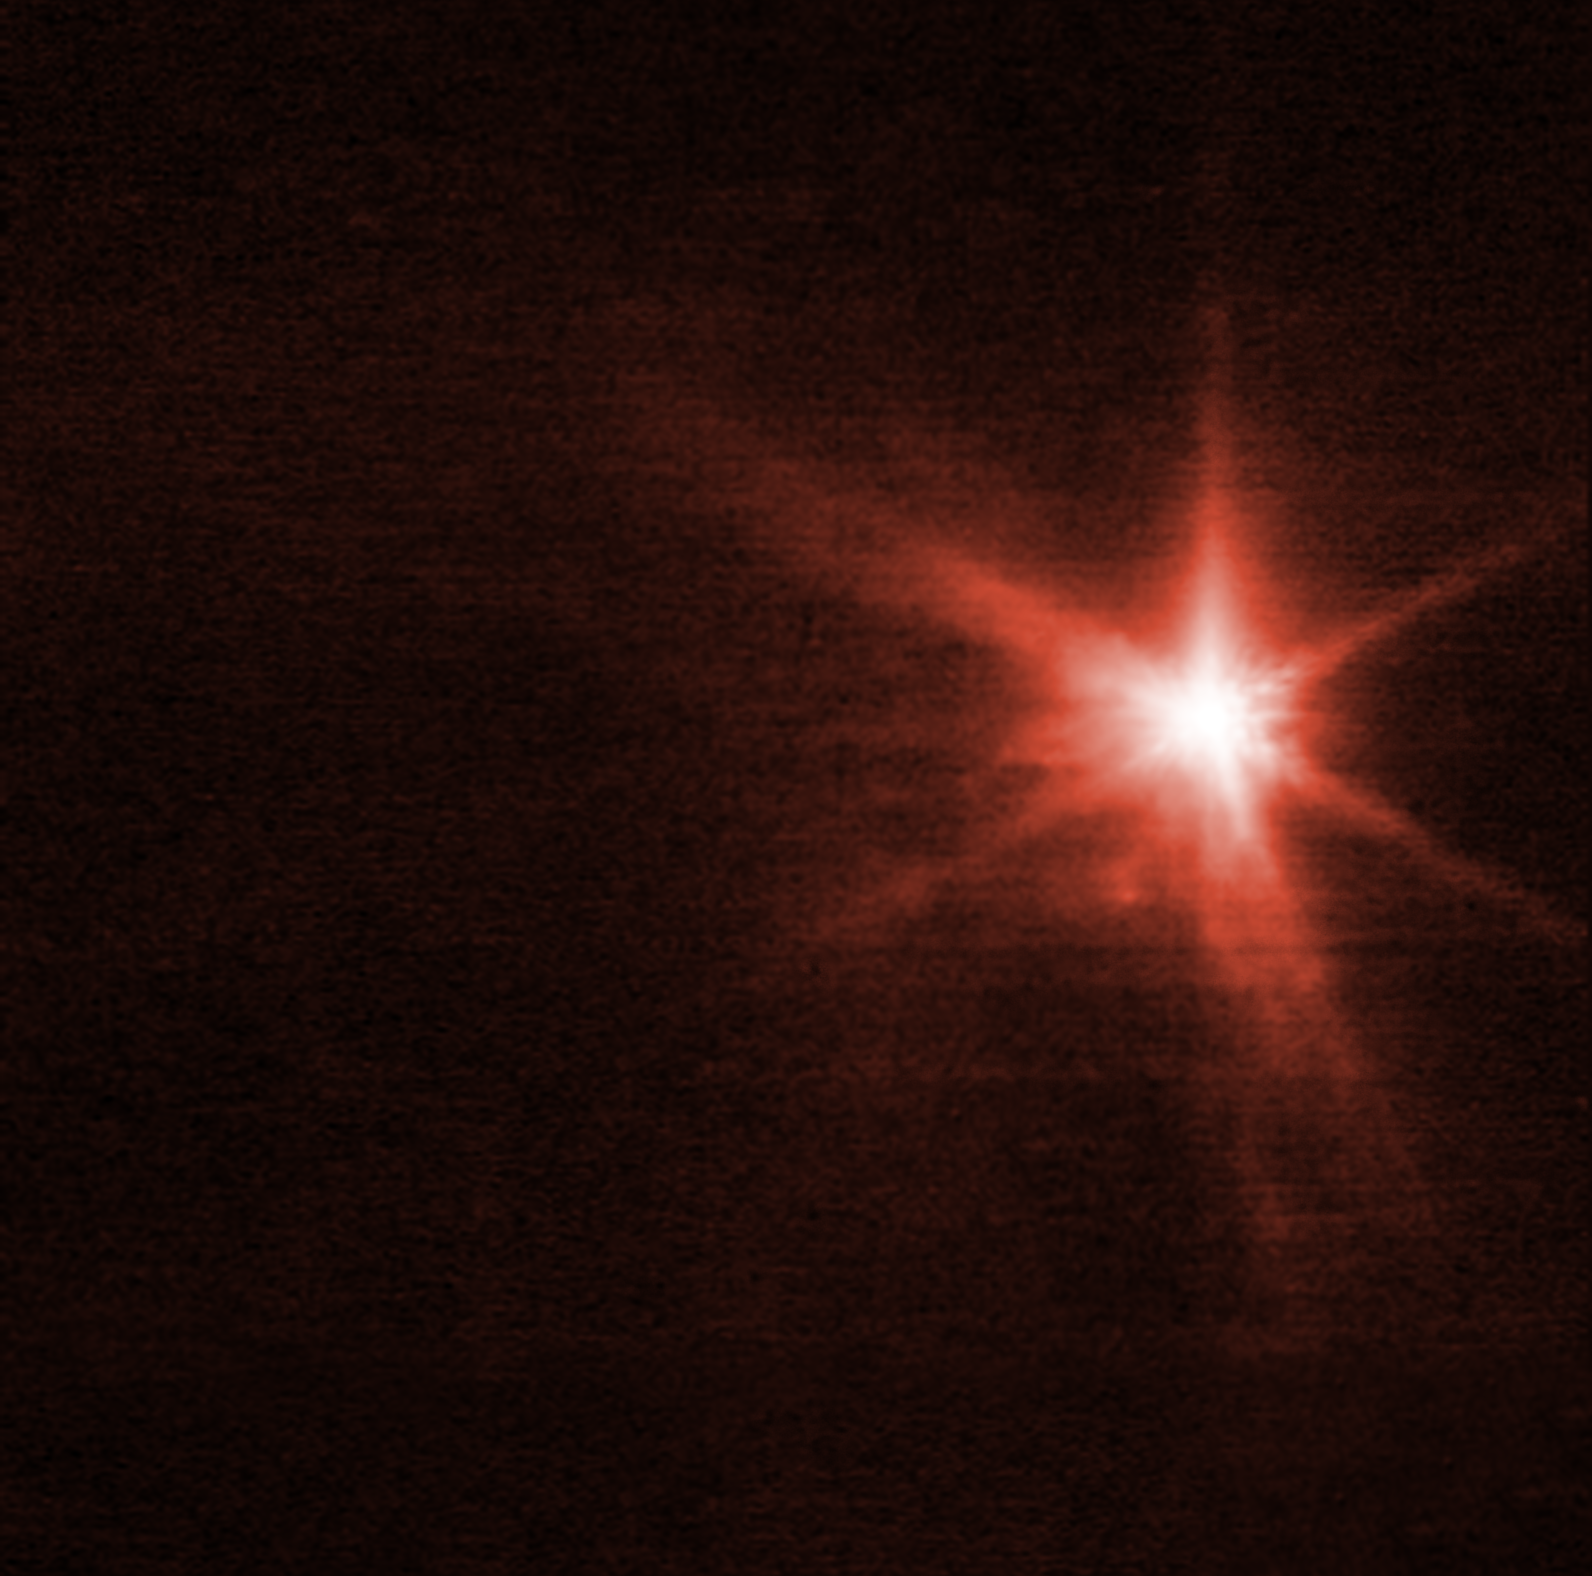

Webb Captures DART Debris (27 September 2022)

This image from the NASA/ESA/CSA James Webb Space Telescope’s Near-Infrared Camera (NIRCam) instrument shows Dimorphos, the asteroid moonlet in the double-asteroid system of Didymos, about 4 hours after NASA’s Double Asteroid Redirection Test (DART) made impact. A tight, compact core and plumes of material appearing as wisps streaming away from the centre of where the impact took place, are visible in the image. Those sharp points are Webb’s distinctive eight diffraction spikes, an artefact of the telescope’s structure.

These observations, when combined with data from the NASA/ESA Hubble Space Telescope, will allow scientists to gain knowledge about the nature of the surface of Dimorphos, how much material was ejected by the collision, and how fast it was ejected.

In the coming months, scientists will use Webb’s Mid-Infrared Instrument (MIRI) and Near-Infrared Spectrograph (NIRSpec) to observe Dimorphos further. Spectroscopic data will also provide researchers with insight into the asteroid’s chemical composition.

The observations shown here were conducted in the filter F070W (0.7 microns) and assigned the colour red.

Credit: NASA, ESA, CSA, and STScI